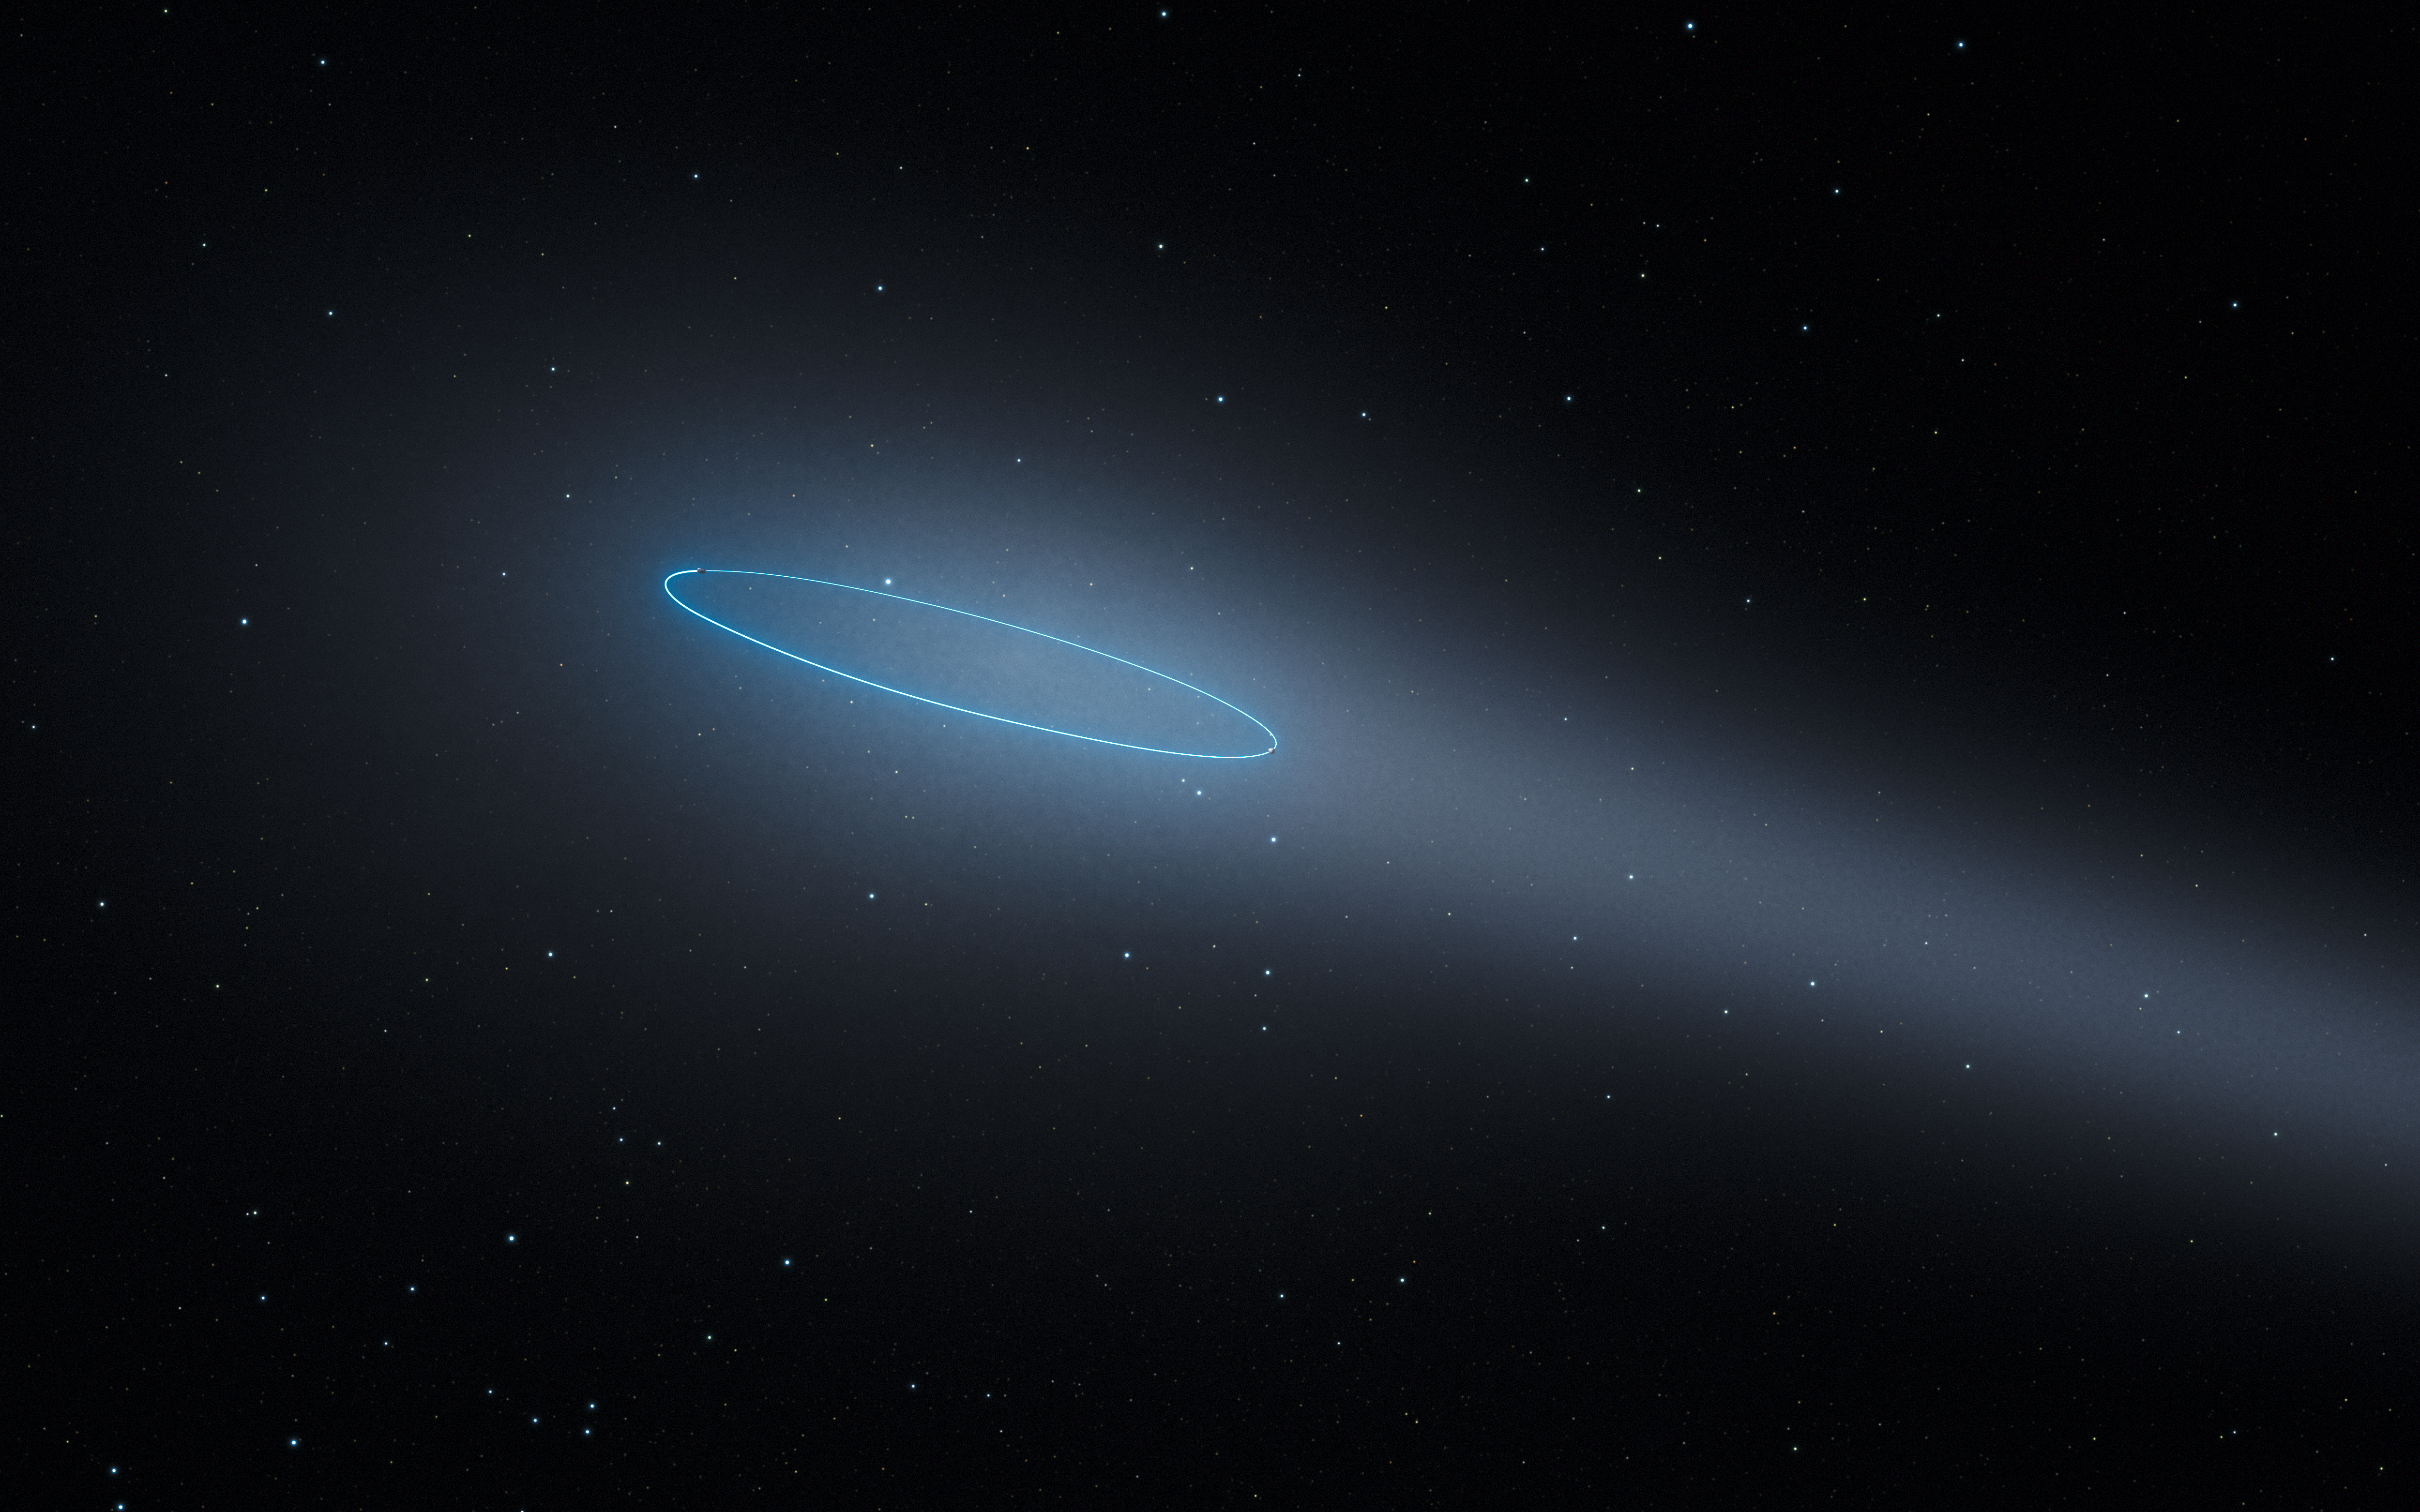

The binary asteroid 288P (artist’s impression)

This artist’s impression shows the binary asteroid 288P, located in the main asteroid belt between the planets Mars and Jupiter. The object is unique as it is a binary asteroid which also behaves like a comet. The comet-like properties are the result of water sublimation, caused by the heat of the Sun. The orbit of the asteroids is marked by a blue ellipse.

Credit: ESA/Hubble, L. Calçada.